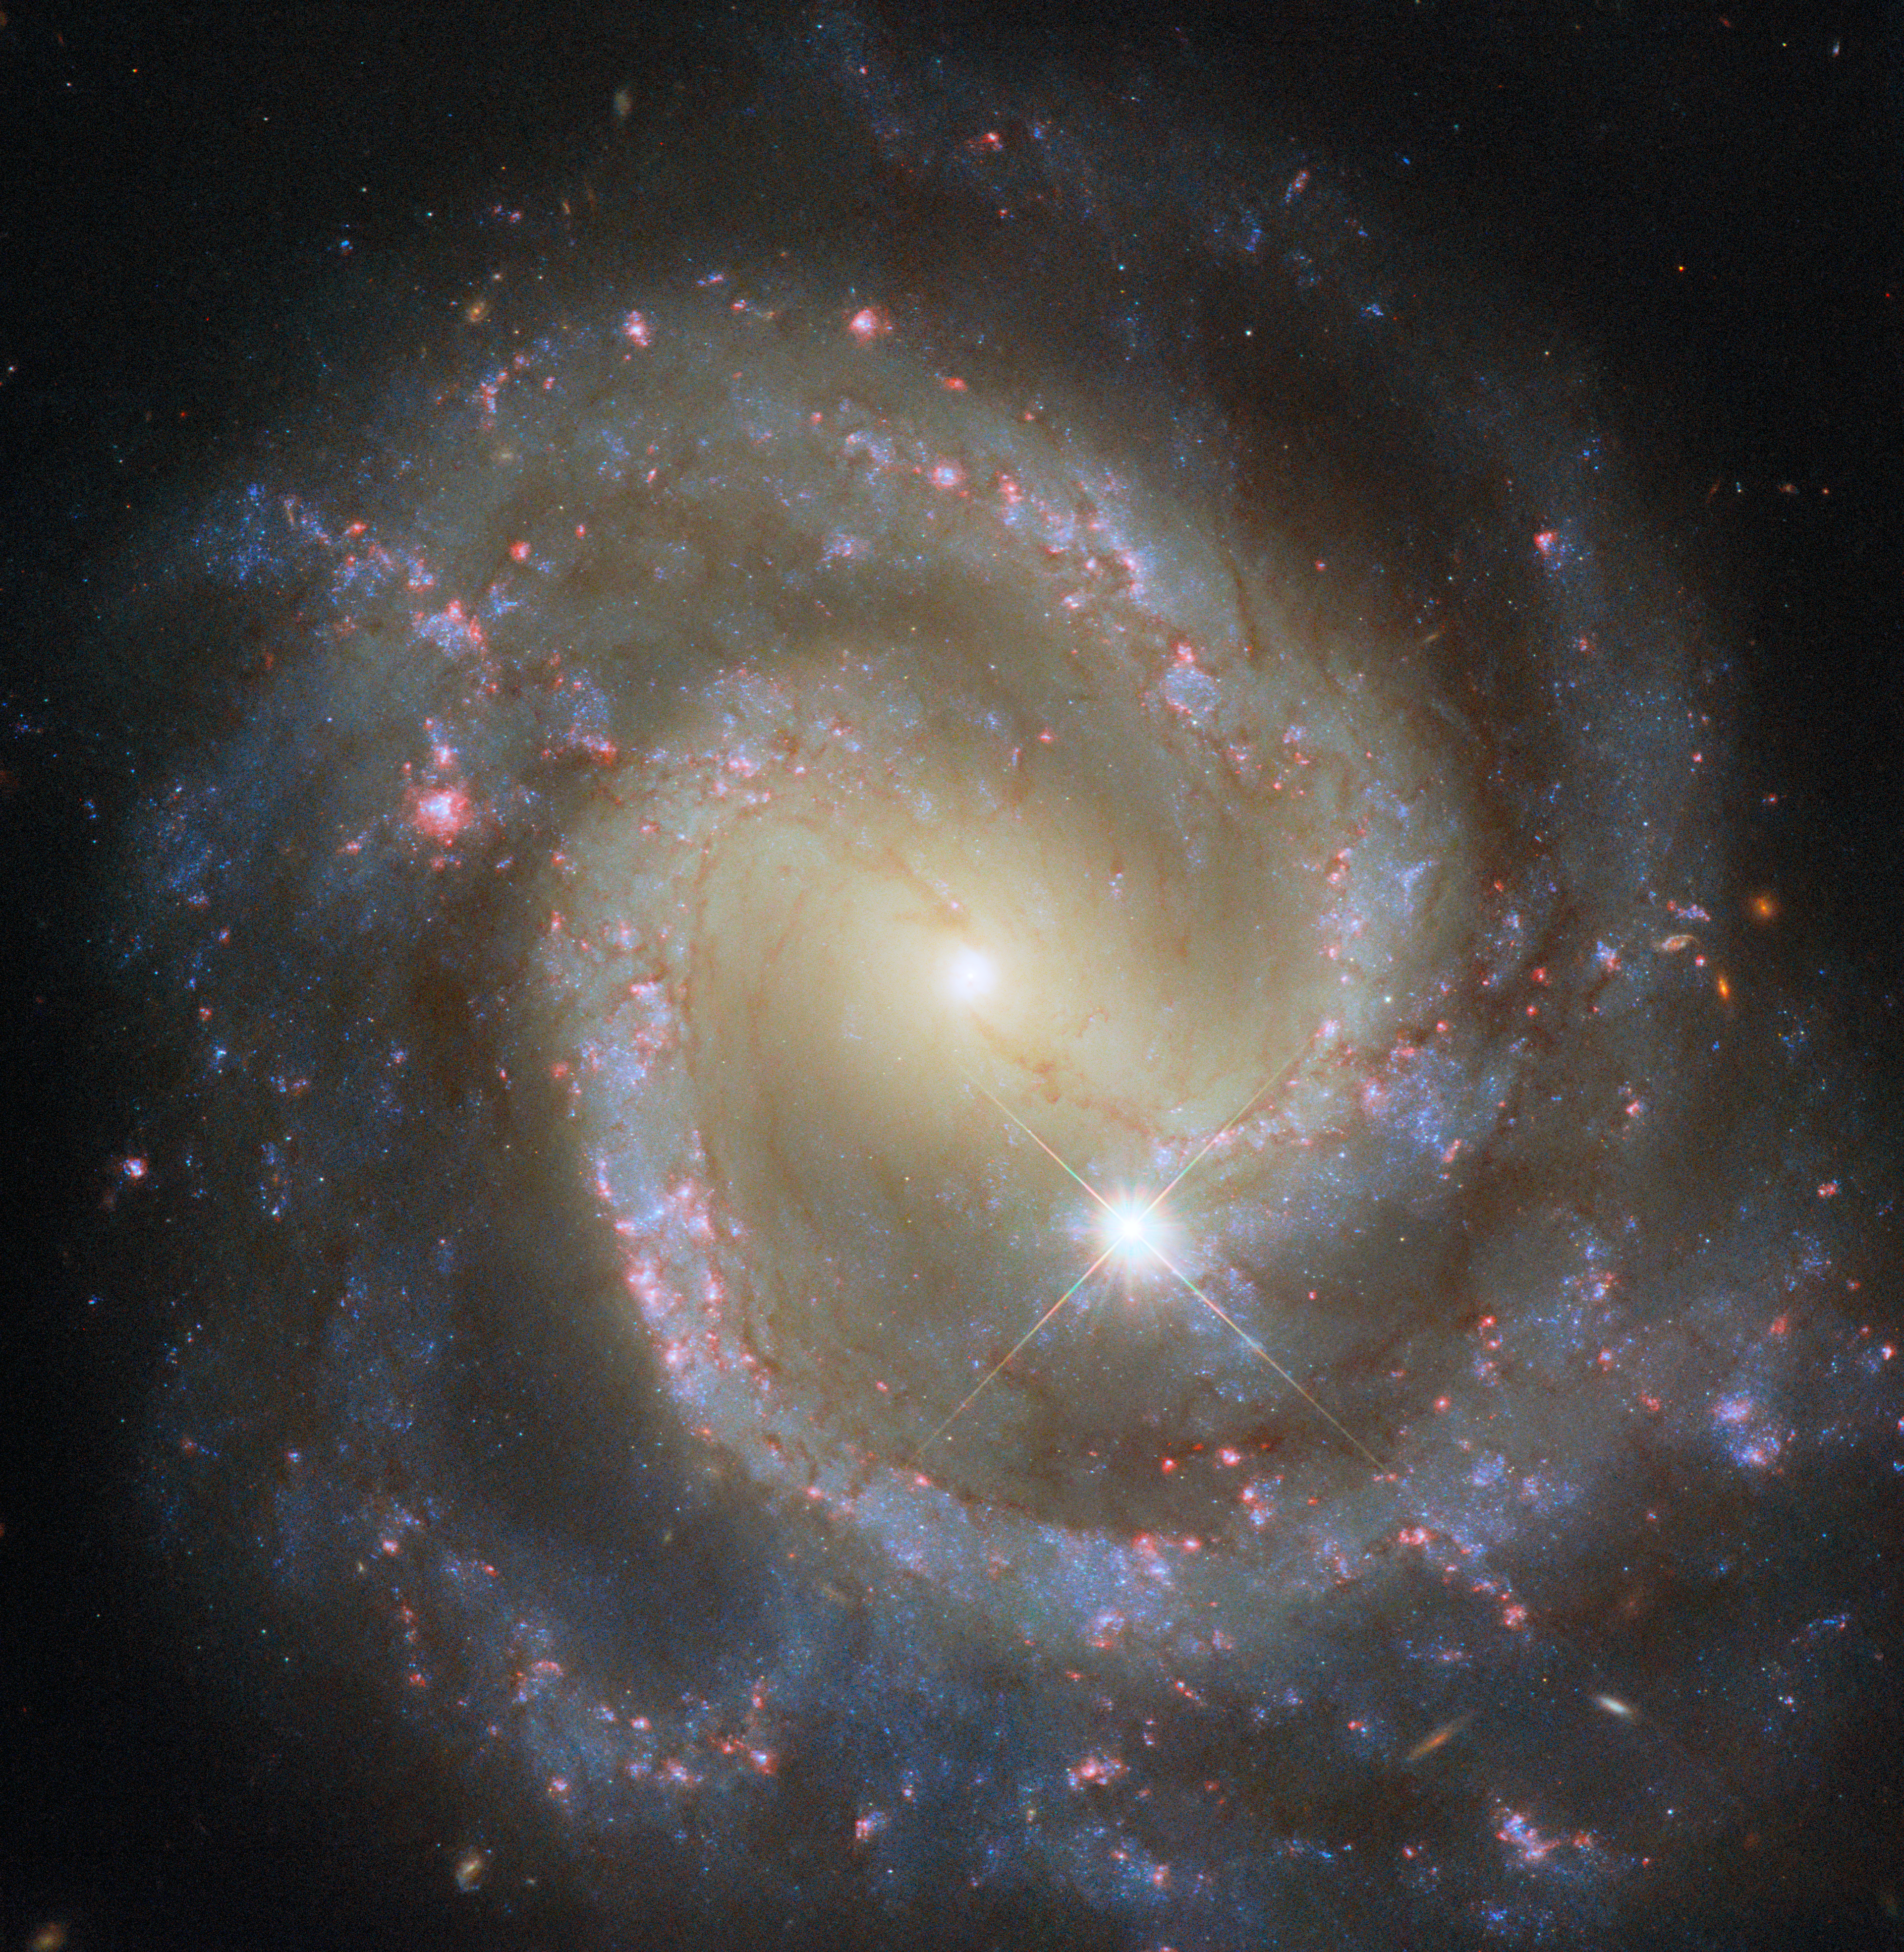

Paired pinwheel seen solo

A single member of a galaxy pair takes centre stage in this NASA/ESA Hubble Space Telescope Picture of the Week. This beautiful spiral galaxy is NGC 3507, which is situated about 46 million light-years away in the constellation Leo. NGC 3507 is classified as a barred spiral because the galaxy’s sweeping spiral arms emerge from the ends of a central bar of stars rather than the central point of the galaxy.

Though pictured solo here, NGC 3507 actually travels the Universe with a galactic partner named NGC 3501 that is located outside the frame. NGC 3501 was featured in a previous Picture of the Week. While NGC 3507 is a quintessential galactic pinwheel, its partner resembles a streak of quicksilver across the sky. Despite looking completely different, both are spiral galaxies, simply seen from different angles.

For galaxies that are just a few tens of millions of light-years away, like NGC 3507 and NGC 3501, features like spiral arms, dusty gas clouds, and brilliant star clusters are on full display. More distant galaxies appear less detailed. See if you can spot any faraway galaxies in this image: they tend to be orange or yellow and can be anywhere from circular and starlike to narrow and elongated, with hints of spiral arms. Astronomers use instruments called spectrometers to split the light from these distant galaxies to study the nature of these objects in the early Universe.

In addition to these far-flung companions, NGC 3507 is joined by a far nearer object, marked by four spikes of light: a star within the Milky Way, a mere 436 light-years away from Earth.

Credit: ESA/Hubble & NASA, D. Thilker